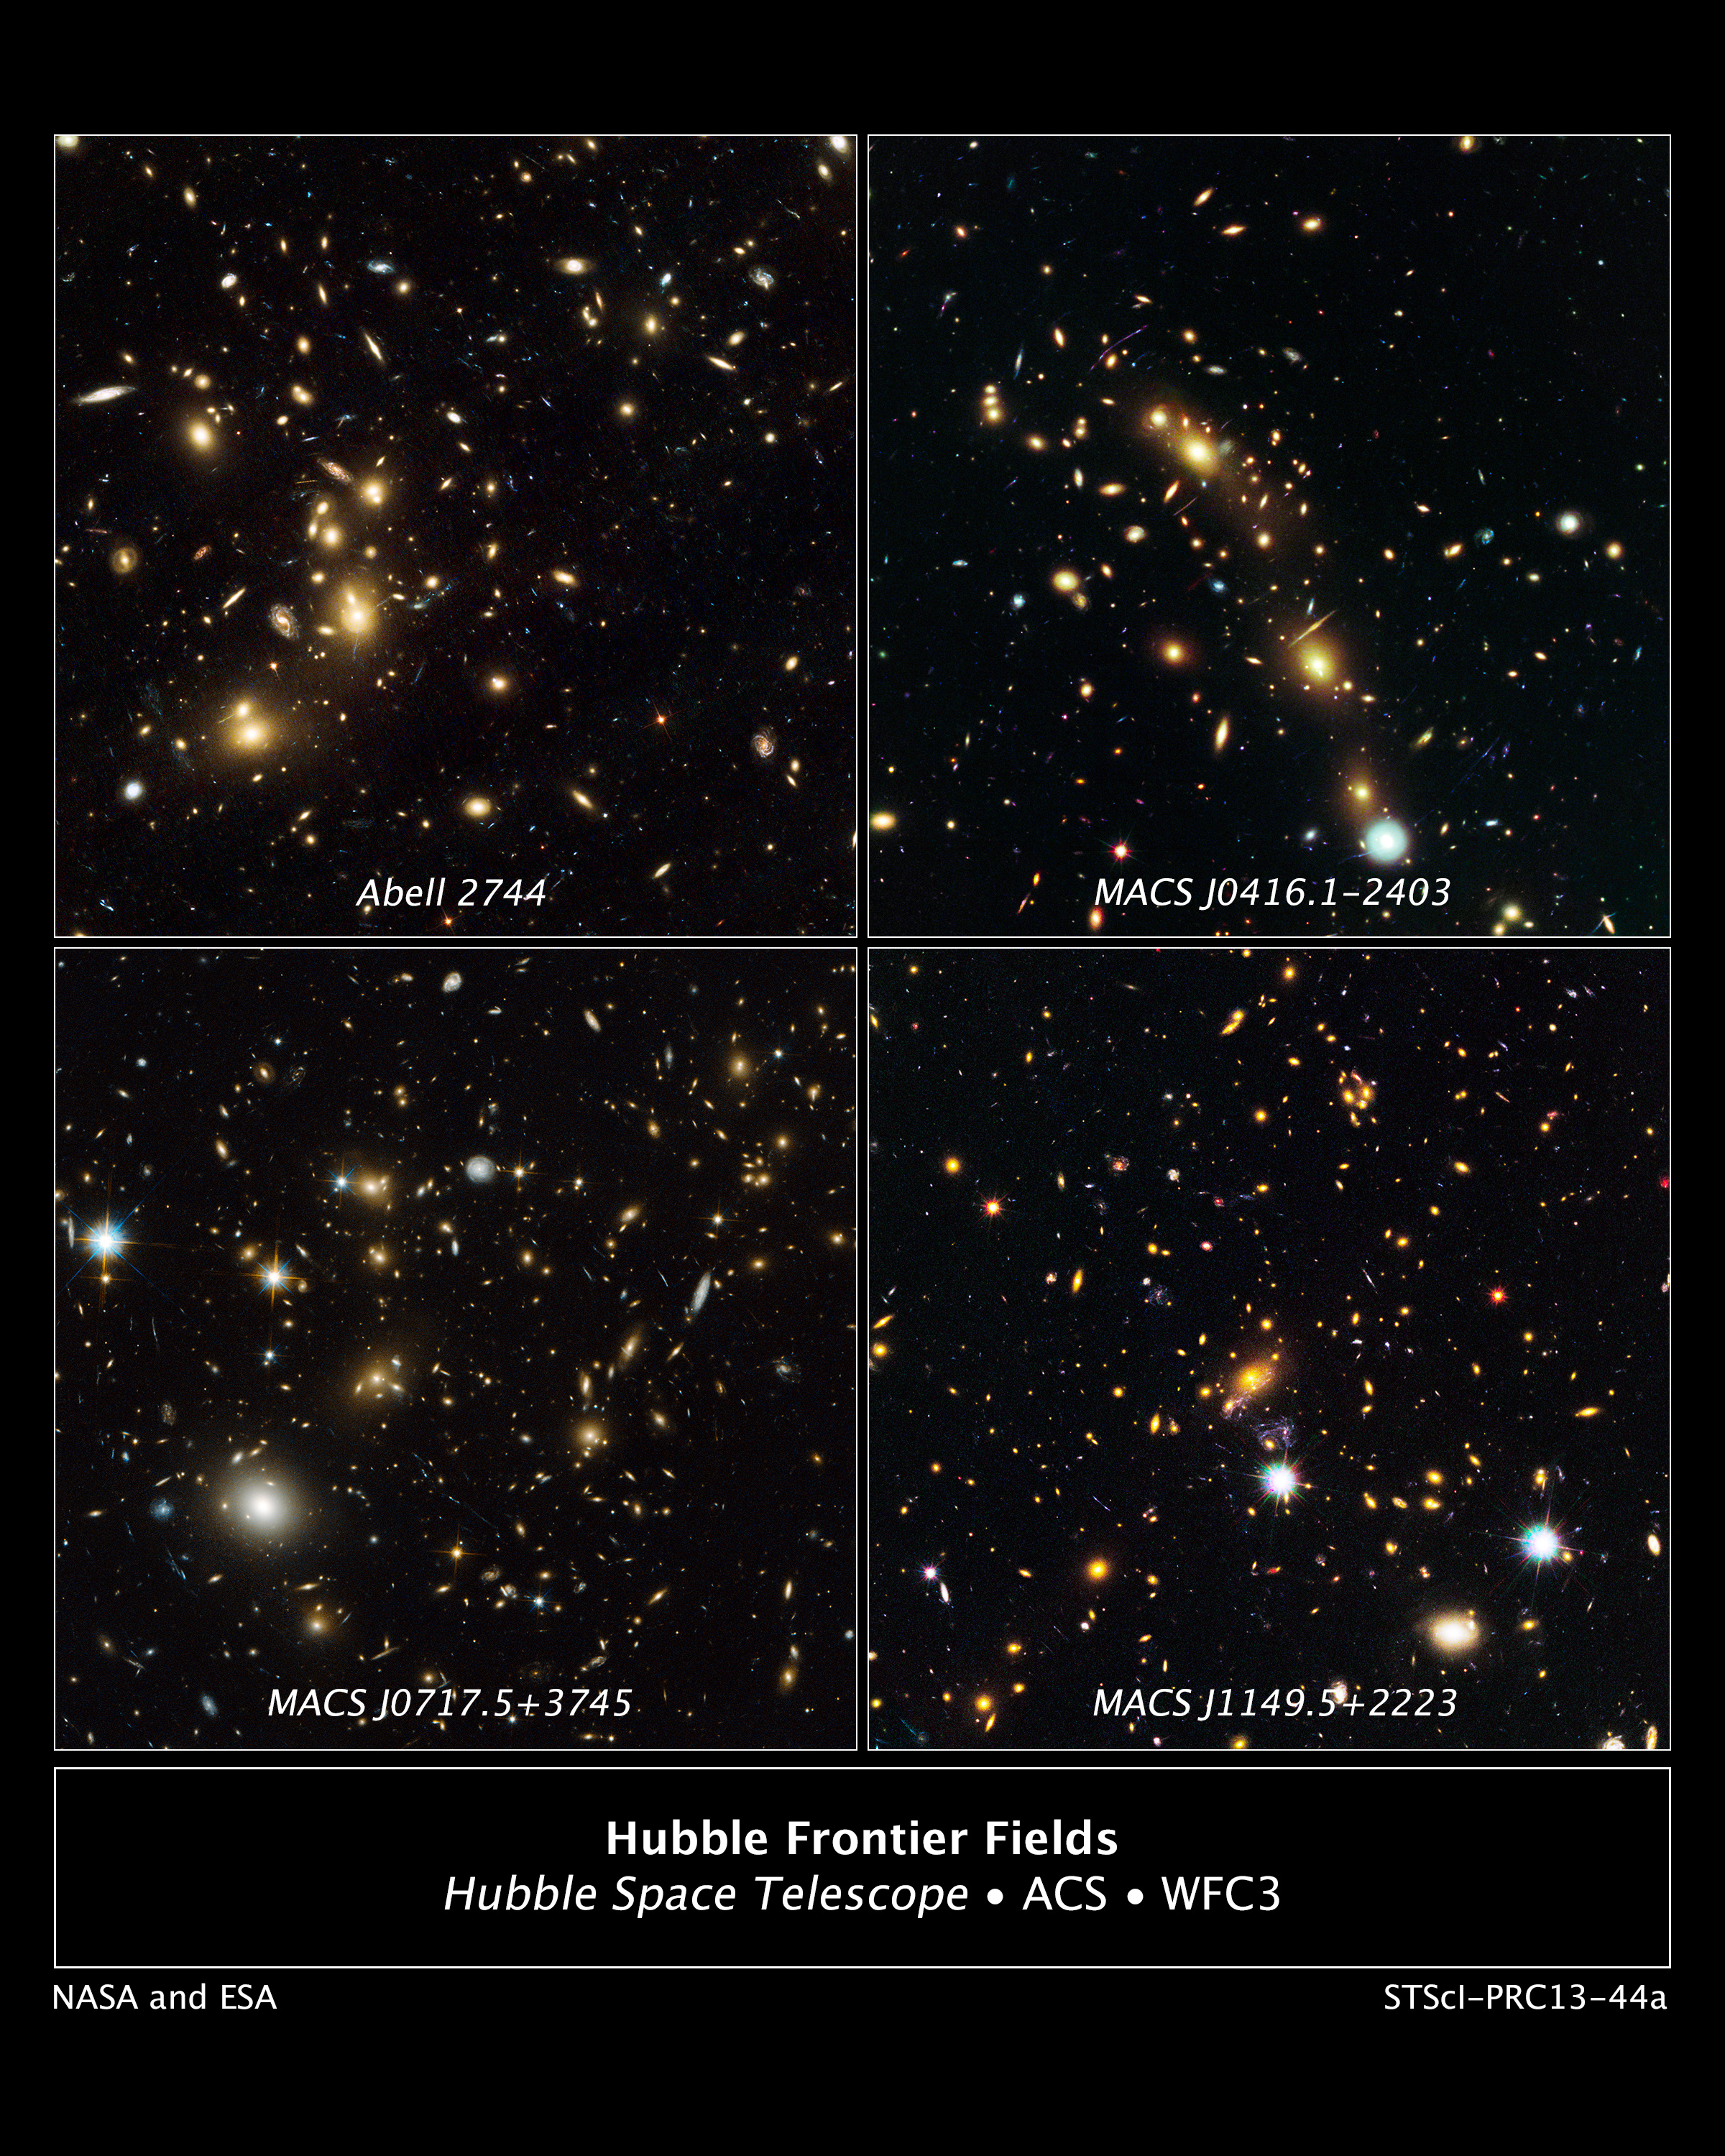

Galaxy clusters targeted by Hubble's Frontier Fields

These are NASA/ESA Hubble Space Telescope natural-colour images of four target galaxy clusters that are part of an ambitious new observing program called The Frontier Fields. This program will look deeper into the Universe than ever before. With a boost from natural "zoom lenses" found in space, they should be able to uncover galaxies that are as much as 100 times fainter than what the Hubble, Spitzer, and Chandra space telescopes can typically see. The gravitational fields of the clusters brighten and magnify far-more-distant background galaxies that are so faint they would otherwise be unobservable. The foreground clusters range in distance from 3 billion to 5 billion light-years from Earth.

For information on the exposures and colours in this image, visit http://hubblesite.org/newscenter/archive/releases/2013/44/fastfacts/.

Credit: NASA, ESA, and J. Lotz and M. Mountain (STScI)